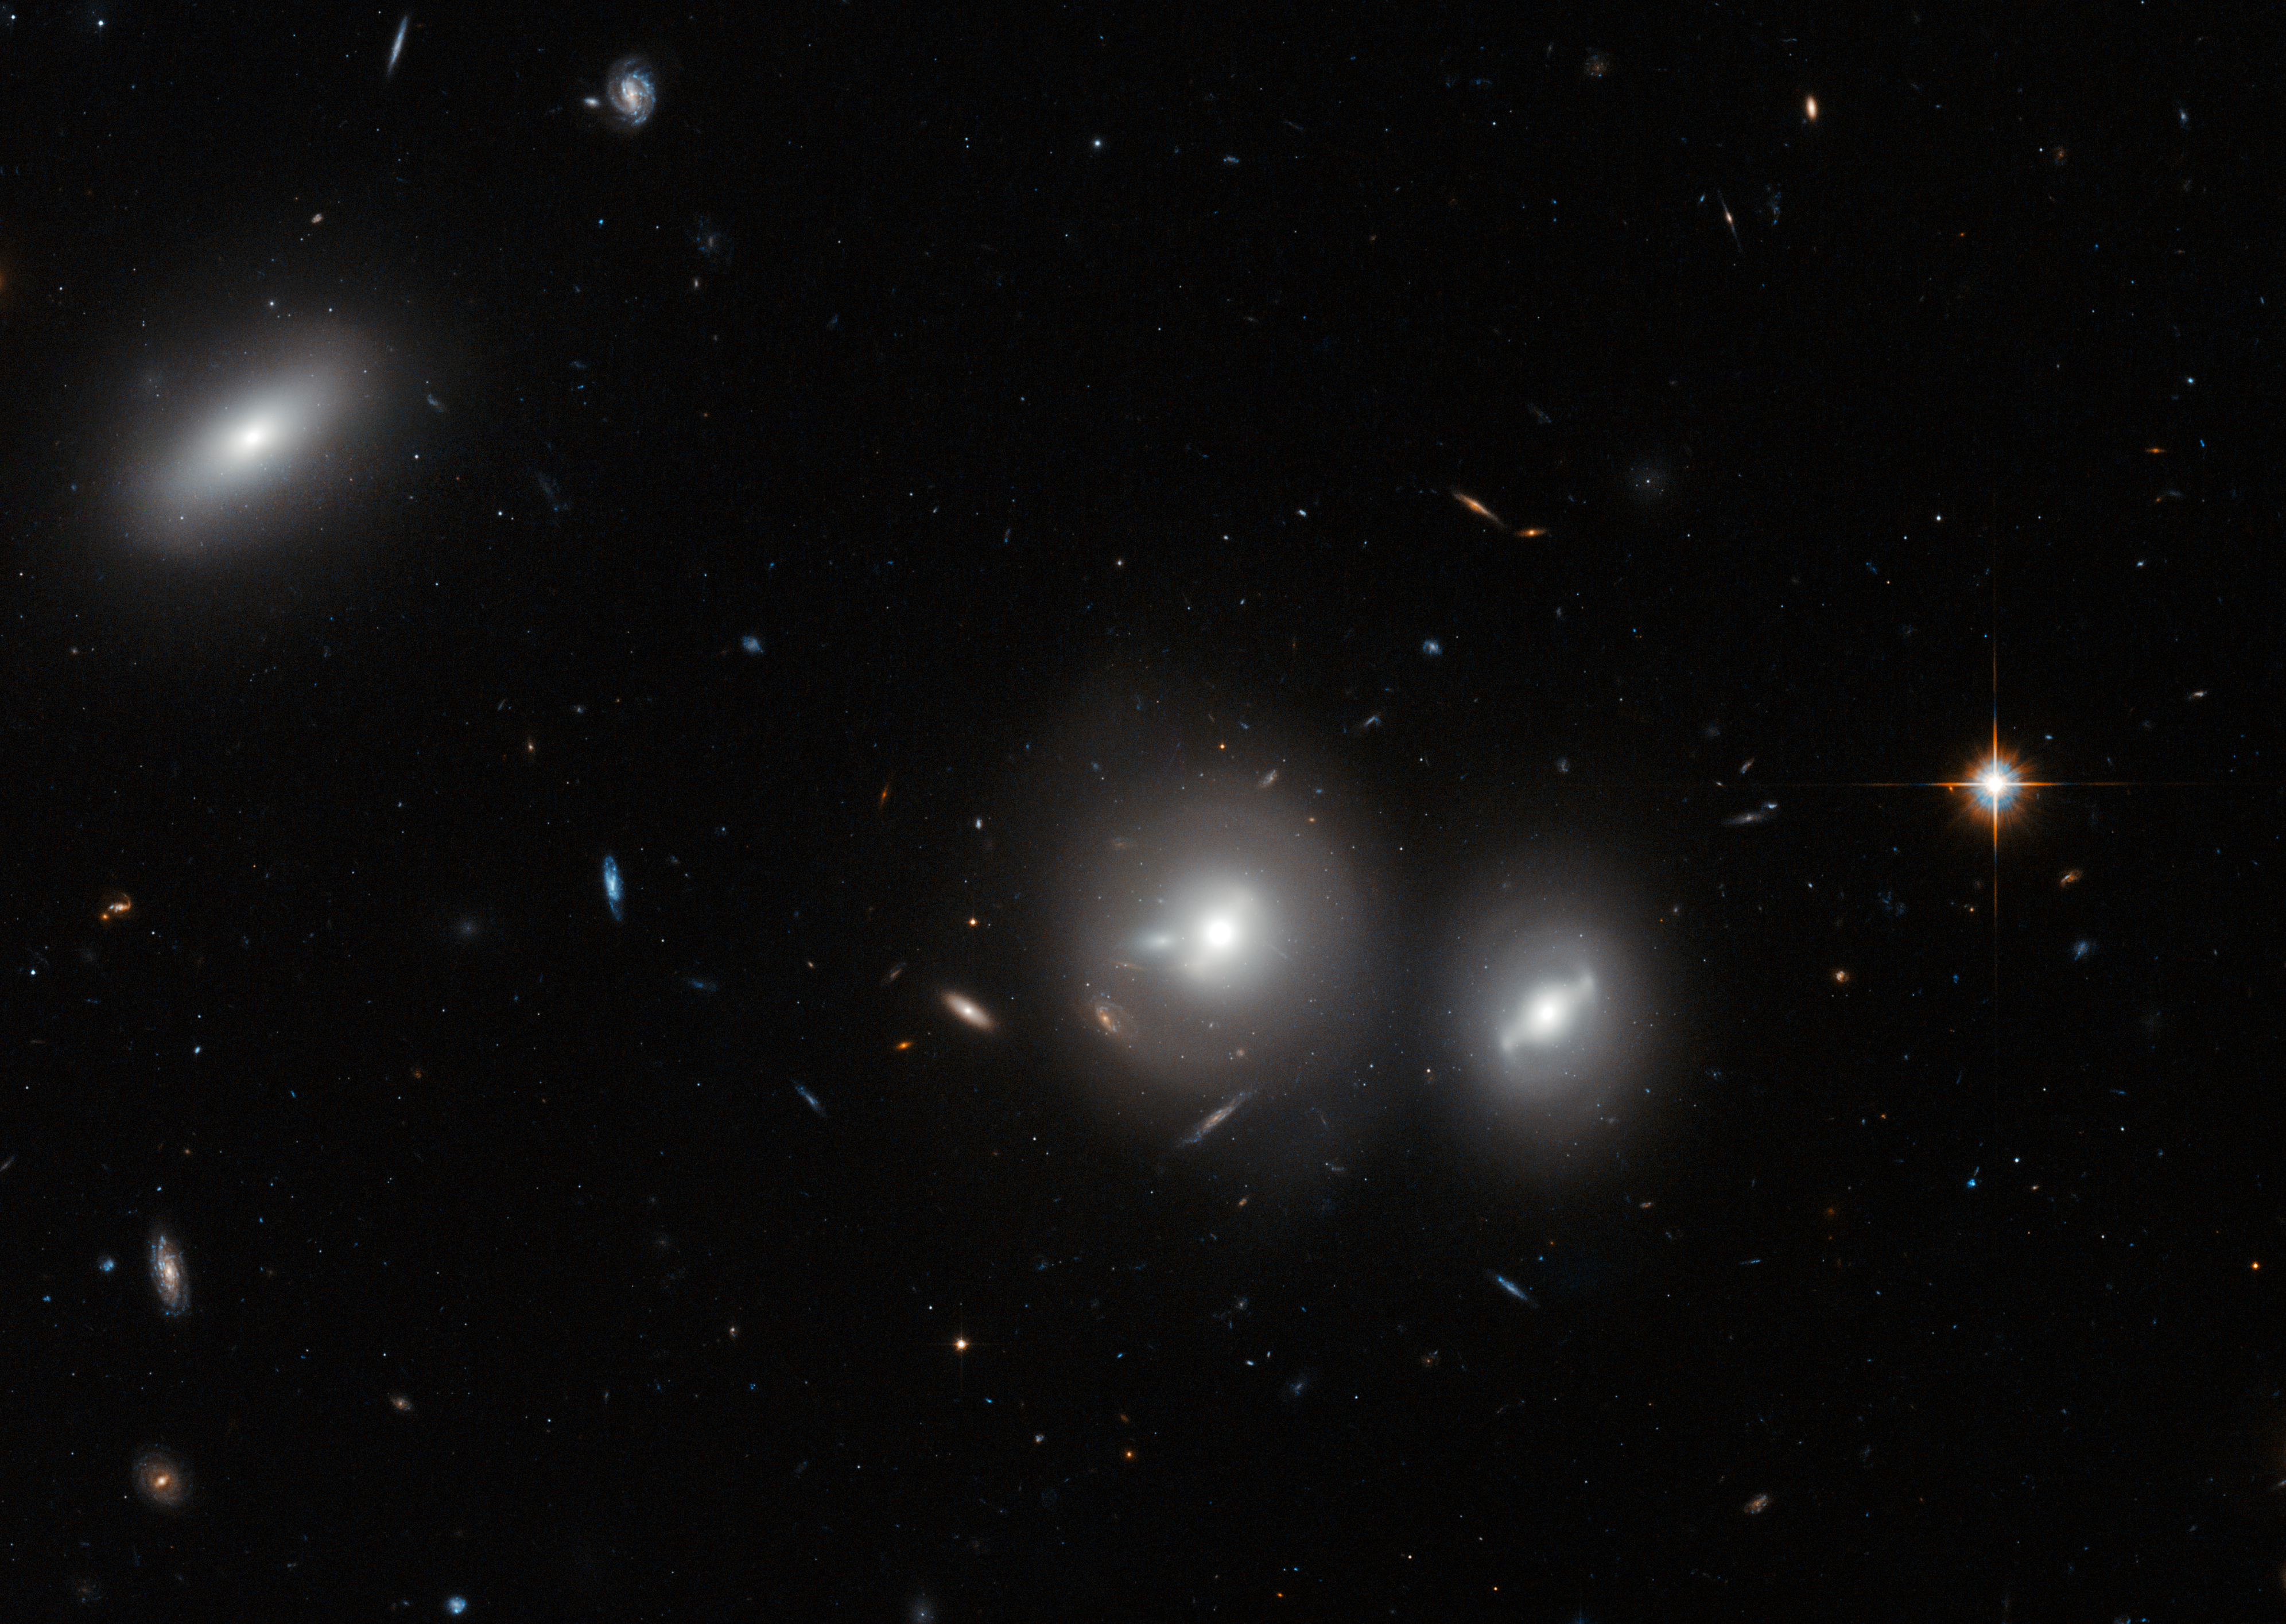

Hubble close-up on the Coma Cluster

In this new image Hubble peeks into the Coma Cluster, a massive gathering of galaxies located towards the constellation of Coma Berenices. This large cluster is around 350 million light-years away from us and contains over 1000 identified galaxies, the majority of which are elliptical.

The bright, saucer-shaped objects surrounded by misty halos in this image are galaxies, each of them host to many millions of stars. The background of the image is full of distant galaxies, many of them with spiral shapes, that are located much further away and do not belong to the cluster.

Visible in this image are three galaxies within the Coma Cluster: IC 4041 (far left), IC 4042 (centre), and GP 236 (right).

A version of this image was entered into the Hidden Treasures image processing competition by contestant Nick Rose.

Credit: ESA/Hubble & NASA; D. Carter (LJMU) Acknowledgement: Nick Rose